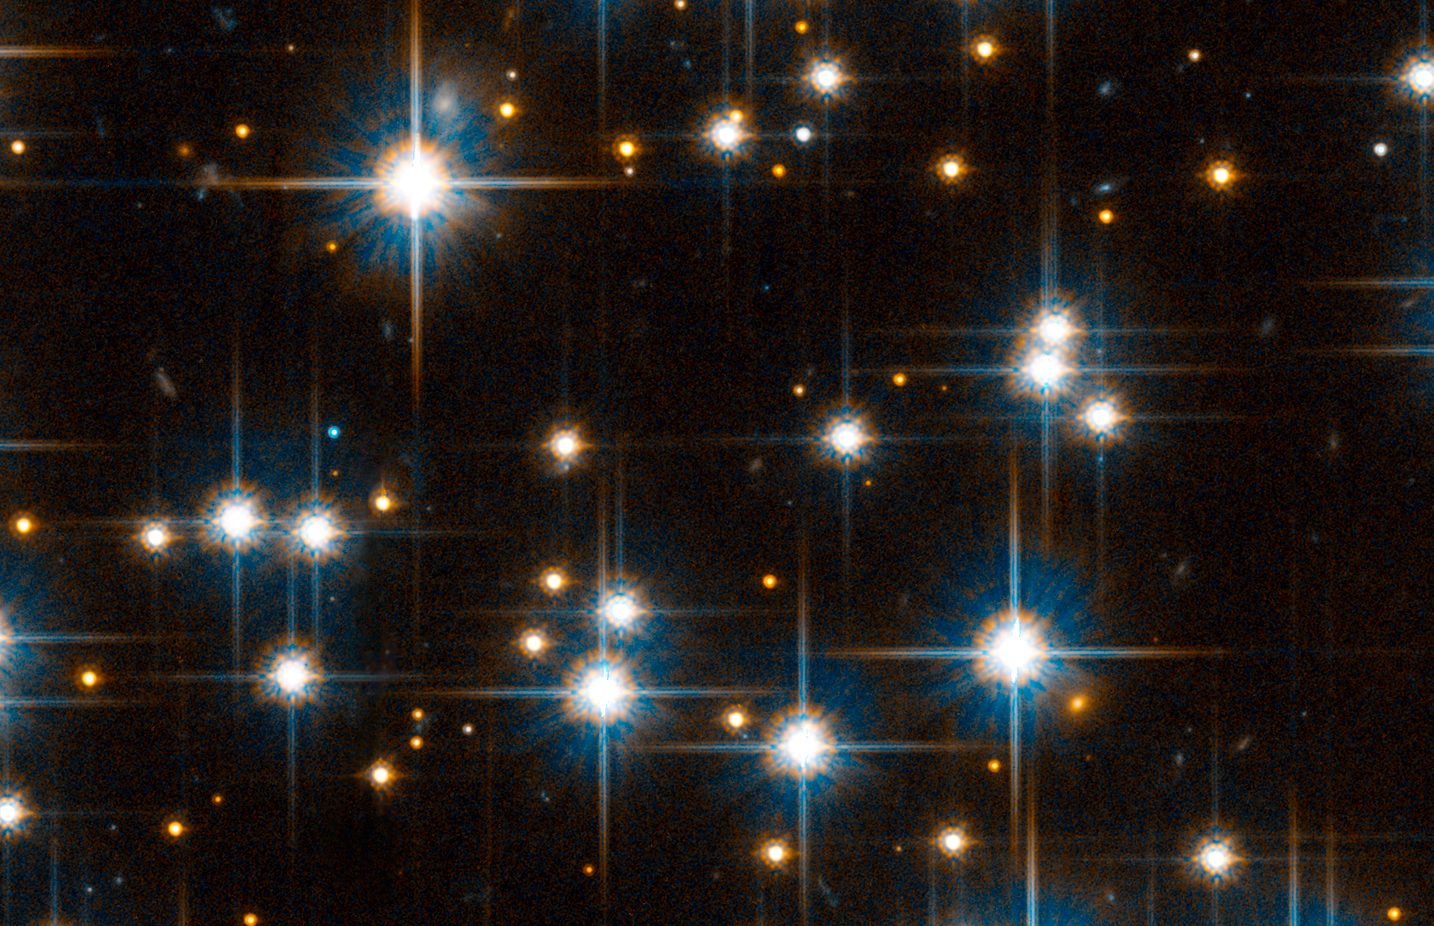

Small region of ACS field reveals faint white dwarfs

A blow up of view of a small region of the Advanced Camera for Surveys field reveals very faint white dwarfs. The hotter dwarfs are 4 billion years old and the cooler dwarfs that are 6 billion years old.

Credit: NASA, ESA, and L. Bedin (STScI)